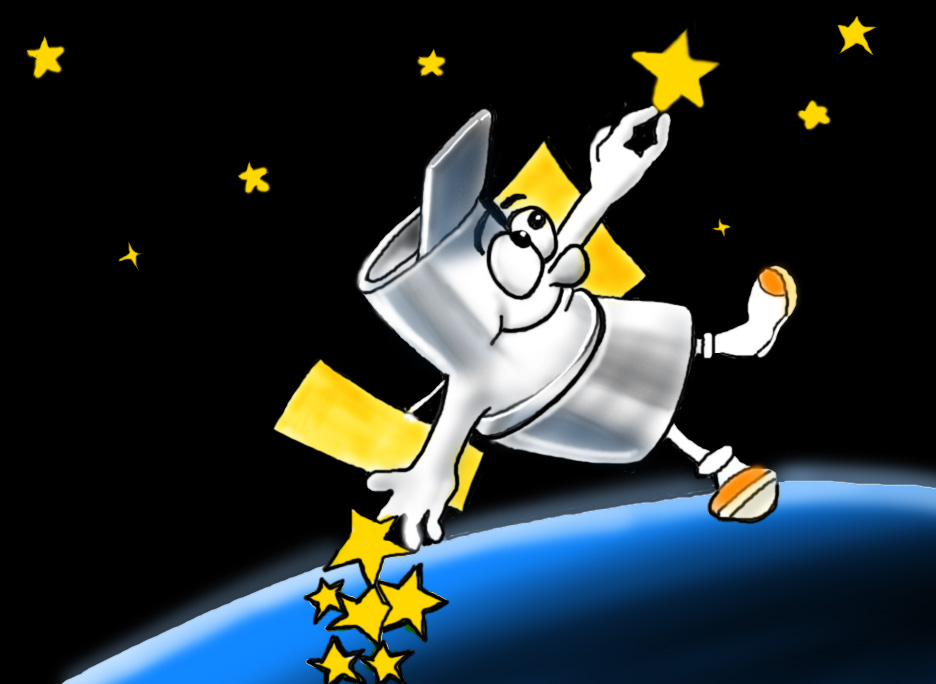

Hubble cartoon

Hubble cartoon

Credit: ESA/Hubble